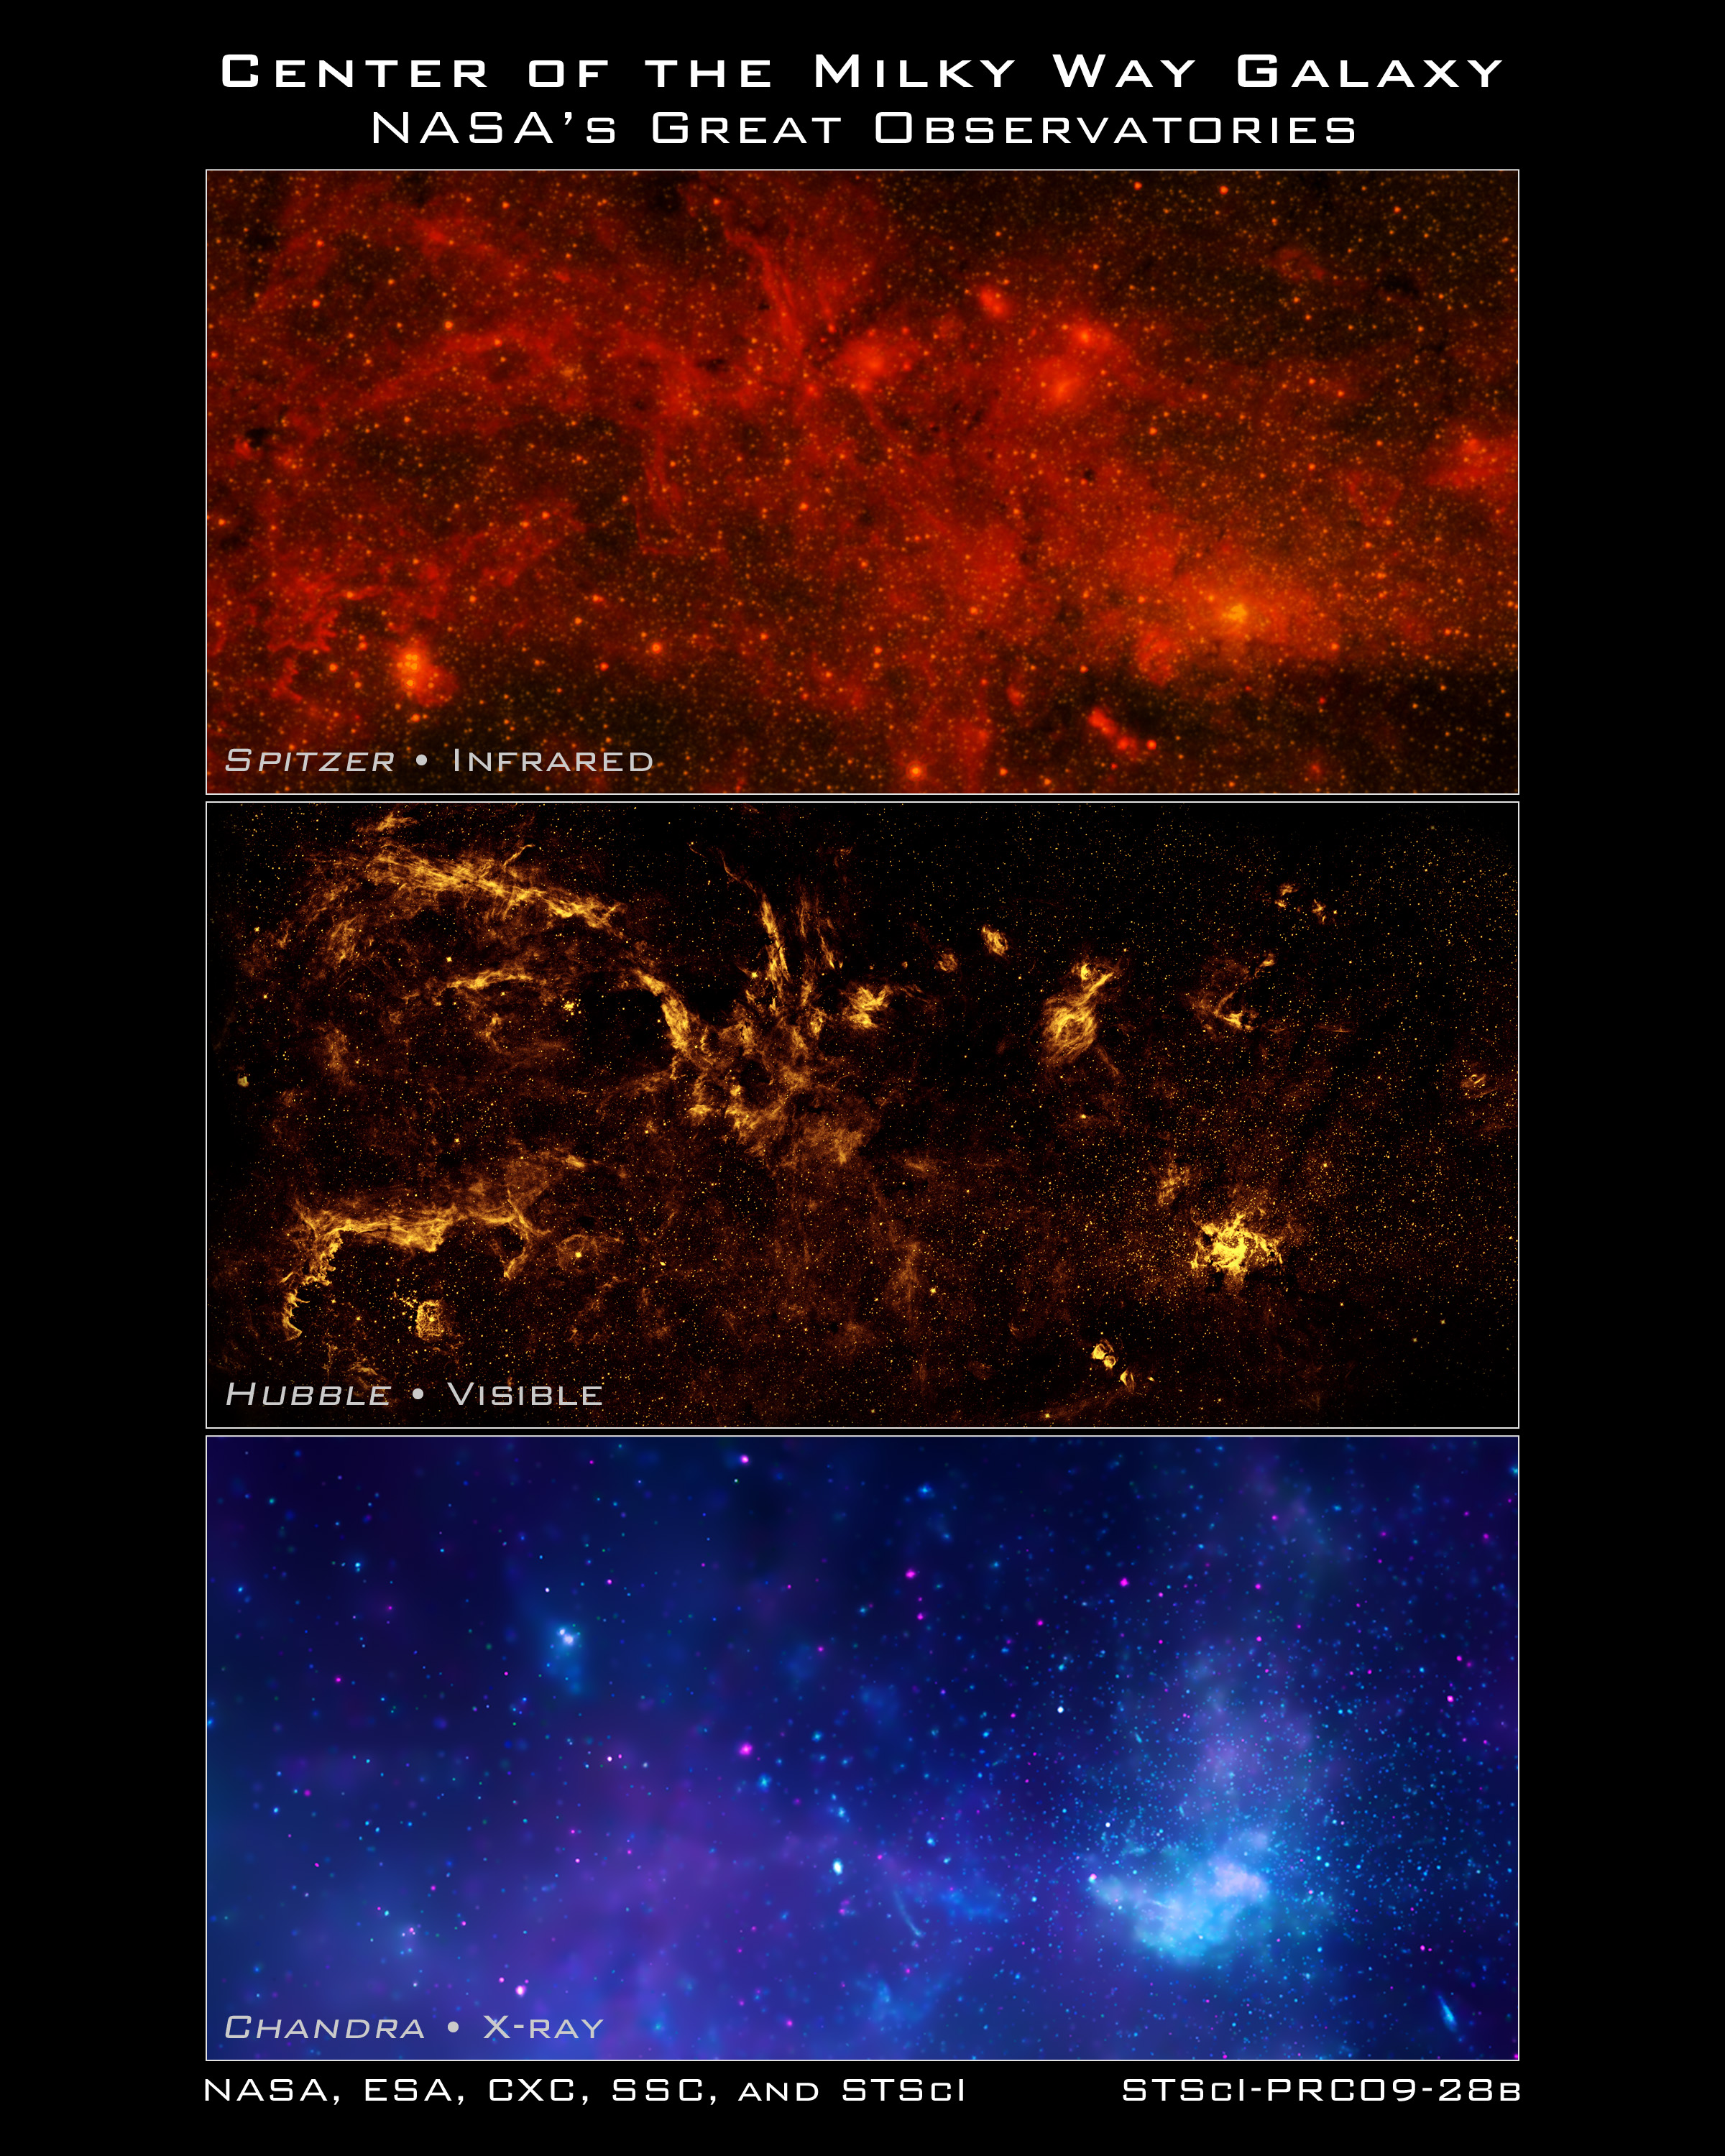

Hubble and other Great Observatories present unique views of the centre of the Milky Way

In celebration of the International Year of Astronomy 2009, NASA's Great Observatories – the Hubble Space Telescope, the Spitzer Space Telescope, and the Chandra X-ray Observatory – have produced a matched trio of images of the central region of our Milky Way galaxy. Each image shows the telescope’s different wavelength view of the galactic centre region, illustrating the unique science each observatory conducts.

[Top Frame] – Spitzer's infrared-light observations provide a detailed and spectacular view of the galactic centre region. The swirling core of our galaxy harbours hundreds of thousands of stars that cannot be seen in visible light. These stars heat the nearby gas and dust. These dusty clouds glow in infrared light and reveal their often dramatic shapes. Some of these clouds harbour stellar nurseries that are forming new generations of stars. Like the downtown of a large city, the centre of our galaxy is a crowded, active and vibrant place.

[Middle Frame] – Although best known for its visible-light images, Hubble also observes over a limited range of infrared light. The galactic centre is marked by the bright patch in the lower right. Along the left side are large arcs of warm gas that have been heated by clusters of bright massive stars. In addition, Hubble uncovered many more massive stars across the region. Winds and radiation from these stars create the complex structures seen in the gas throughout the image. This sweeping panorama is one of the sharpest infrared pictures ever made of the galactic centre region.

[Bottom Frame] – X-rays detected by Chandra expose a wealth of exotic objects and high-energy features. In this image, pink represents lower energy X-rays and blue indicates higher energy. Hundreds of small dots show emission from material around black holes and other dense stellar objects. A supermassive black hole – some four million times more massive than the Sun – resides within the bright region in the lower right. The diffuse X-ray light comes from gas heated to millions of degrees by outflows from the supermassive black hole, winds from giant stars, and stellar explosions. This central region is the most energetic place in our galaxy.

Credit: NASA, ESA, SSC, CXC and STScI